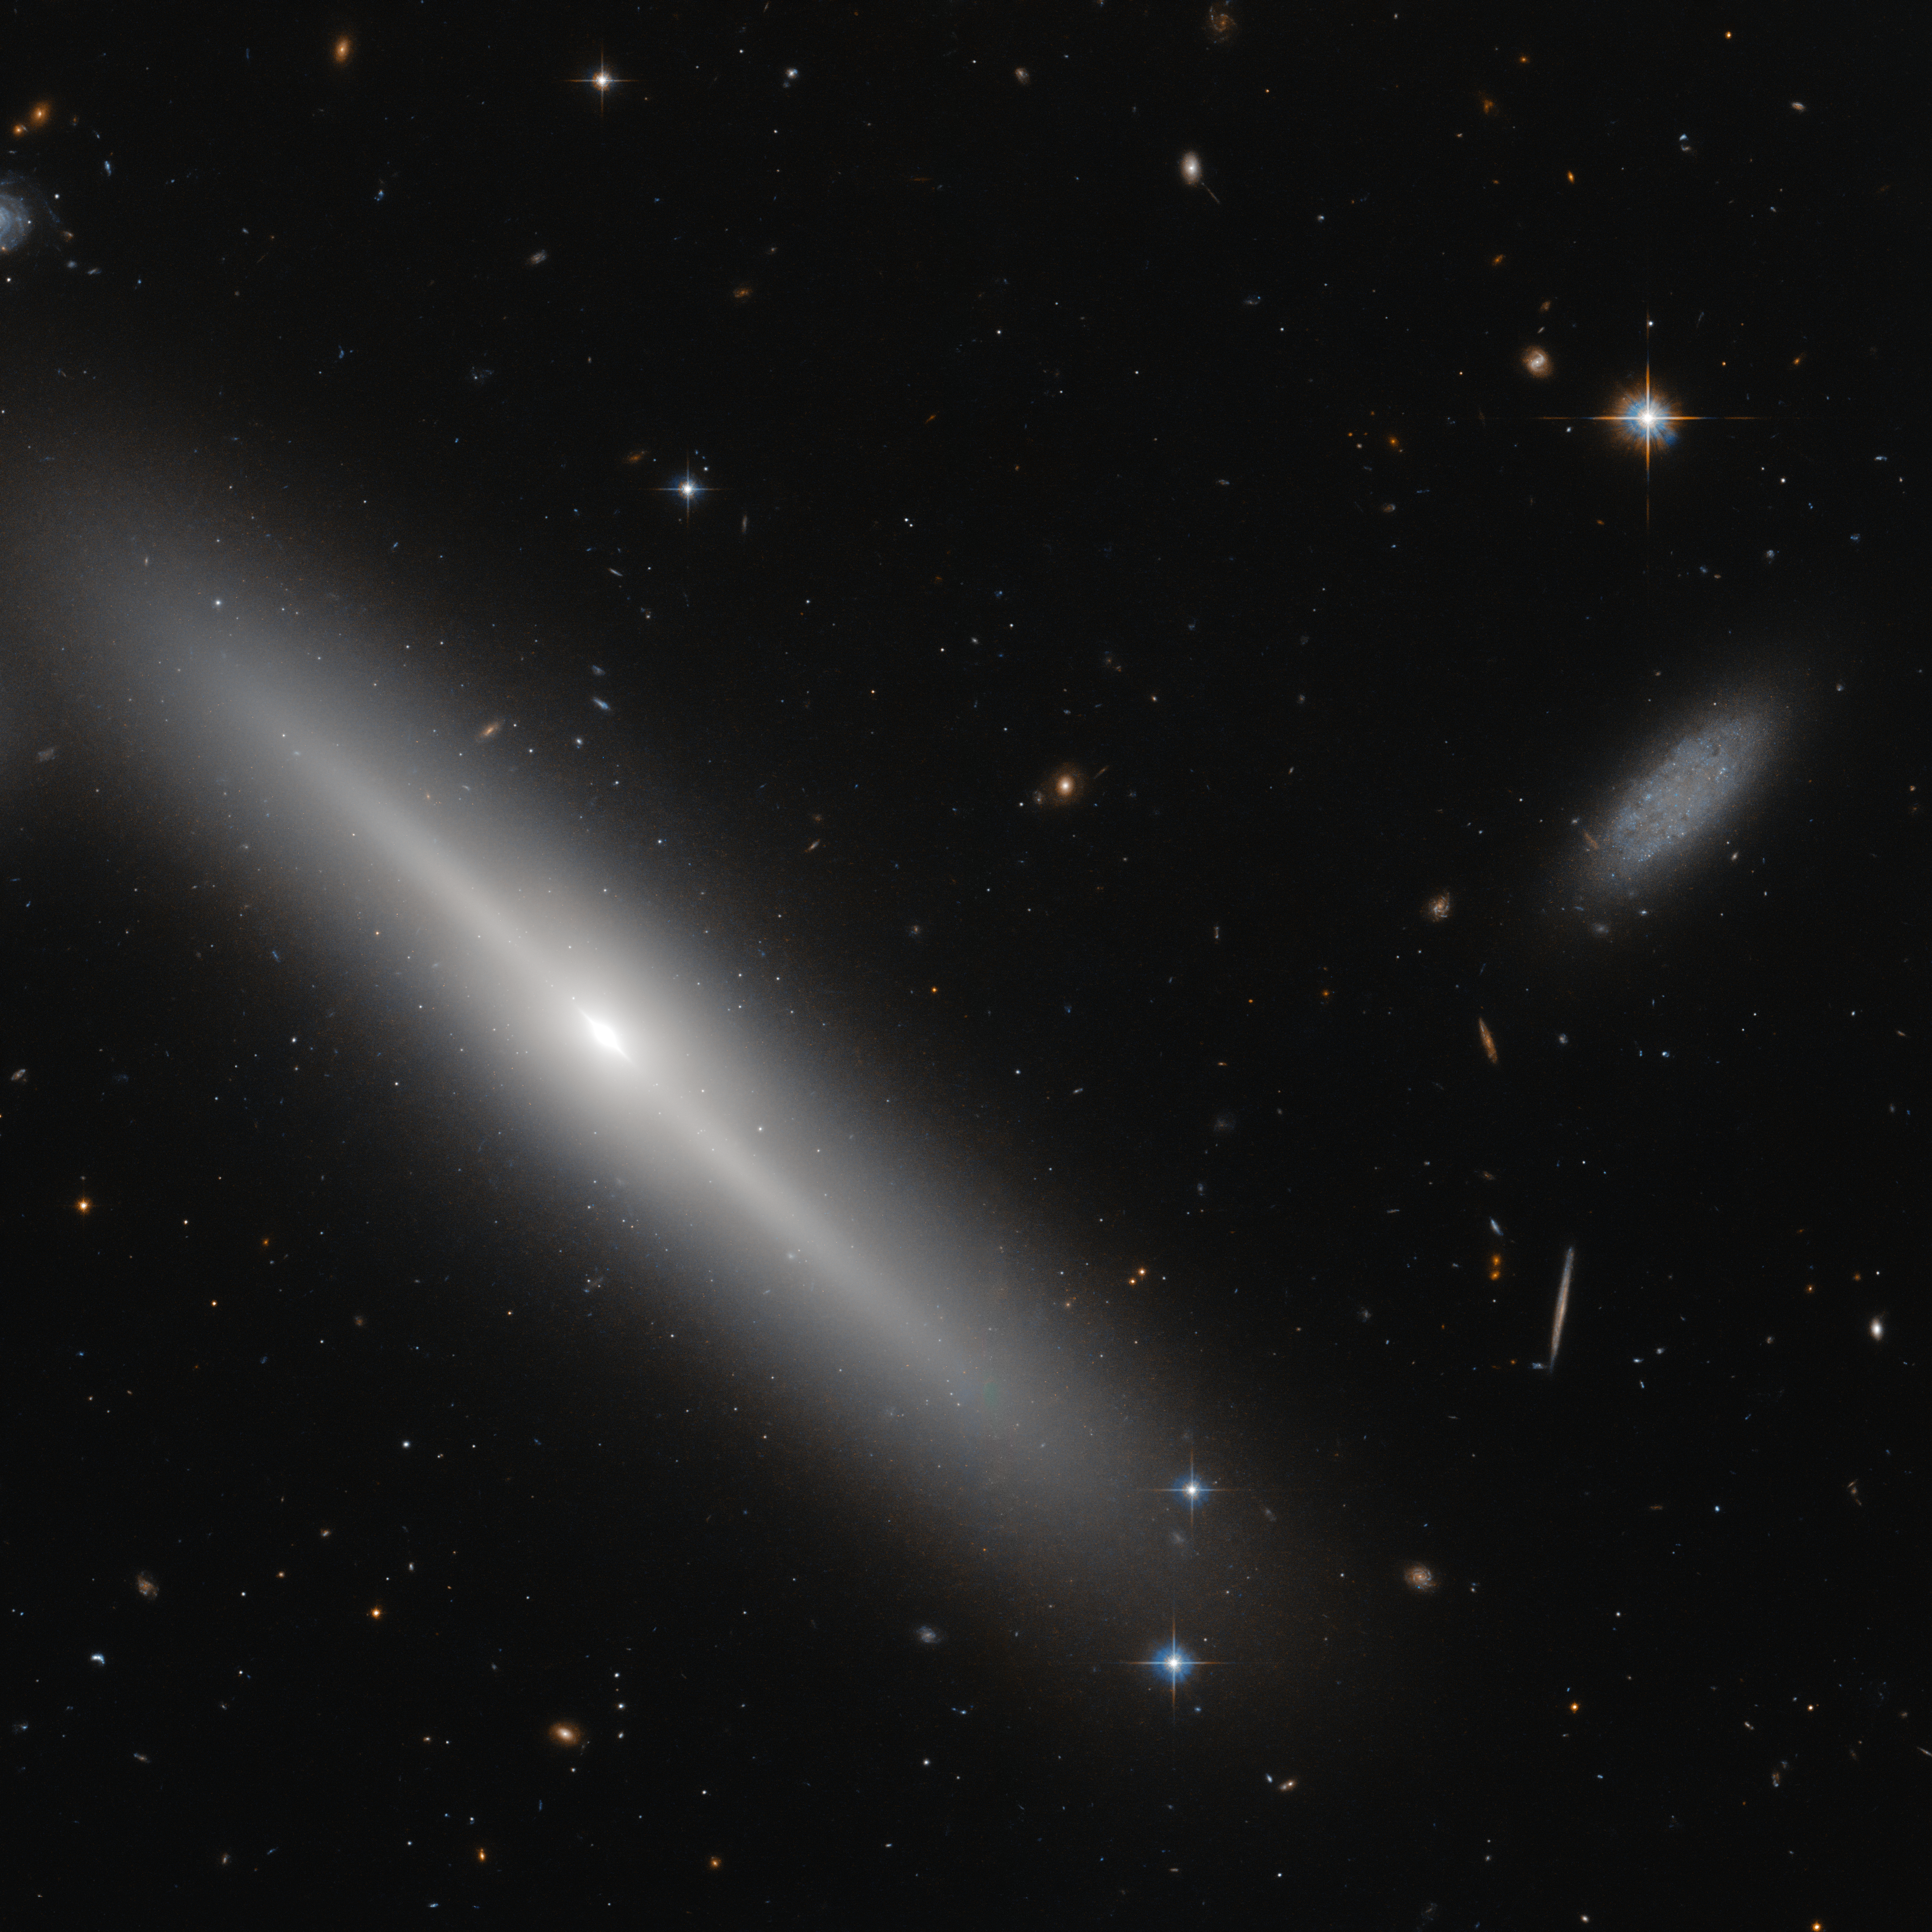

Busy bees

This NASA/ESA Hubble Space Telescope image shows star clusters encircling a galaxy, like bees buzzing around a hive. The hive in question the an edge-on lenticular galaxy NGC 5308, located just under 100 million light-years away in the constellation of Ursa Major (The Great Bear).

Members of a galaxy type that lies somewhere between an elliptical and a spiral galaxy, lenticular galaxies such as NGC 5308 are disc galaxies that have used up, or lost, the majority of their gas and dust. As a result, they experience very little ongoing star formation and consist mainly of old and aging stars. On 9 October 1996, one of NGC 5308’s aging stars met a dramatic demise, exploding as a spectacular Type la supernova.

Lenticular galaxies are often orbited by gravitationally bound collections of hundreds of thousands of older stars. Called globular clusters, these dense collections of stars form a delicate halo as they orbit around the main body of NGC 5308, appearing as bright dots on the dark sky.

The dim, irregular galaxy to the right of NGC 5308 is known, rather prosaically, as SDSS J134646.18+605911.9

Credit: ESA/Hubble & NASA Acknowledgement: Judy Schmidt (Geckzilla)